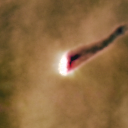

142-301

One of 42 new proplyds discovered in the Orion Nebula, 142-301 is one of the bright proplyds that lies relatively close to the nebula’s brightest star, Theta 1 Orionis C. This tadpole-shaped tail is actually a jet of matter flowing away from the excited cusp.

Credit: NASA/ESA and L. Ricci (ESO)